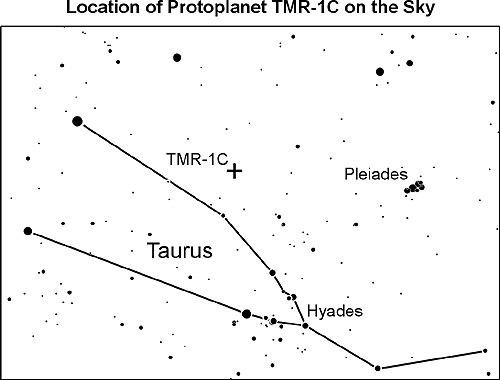

Location of TMR-1C on the sky

Originally suspected to be the first directly detected planet outside our solar system follow up observations have shown that the object is most likley a backgrpund star whose light is has been dimmed and reddened by interestellar dust. However, even newer observations now brought the phantom planet back from oblivion.

This image shows the position of TMR-1C on the Sky, next to the constellation Taurus and the Pleiades.

Credit: NASA & ESA